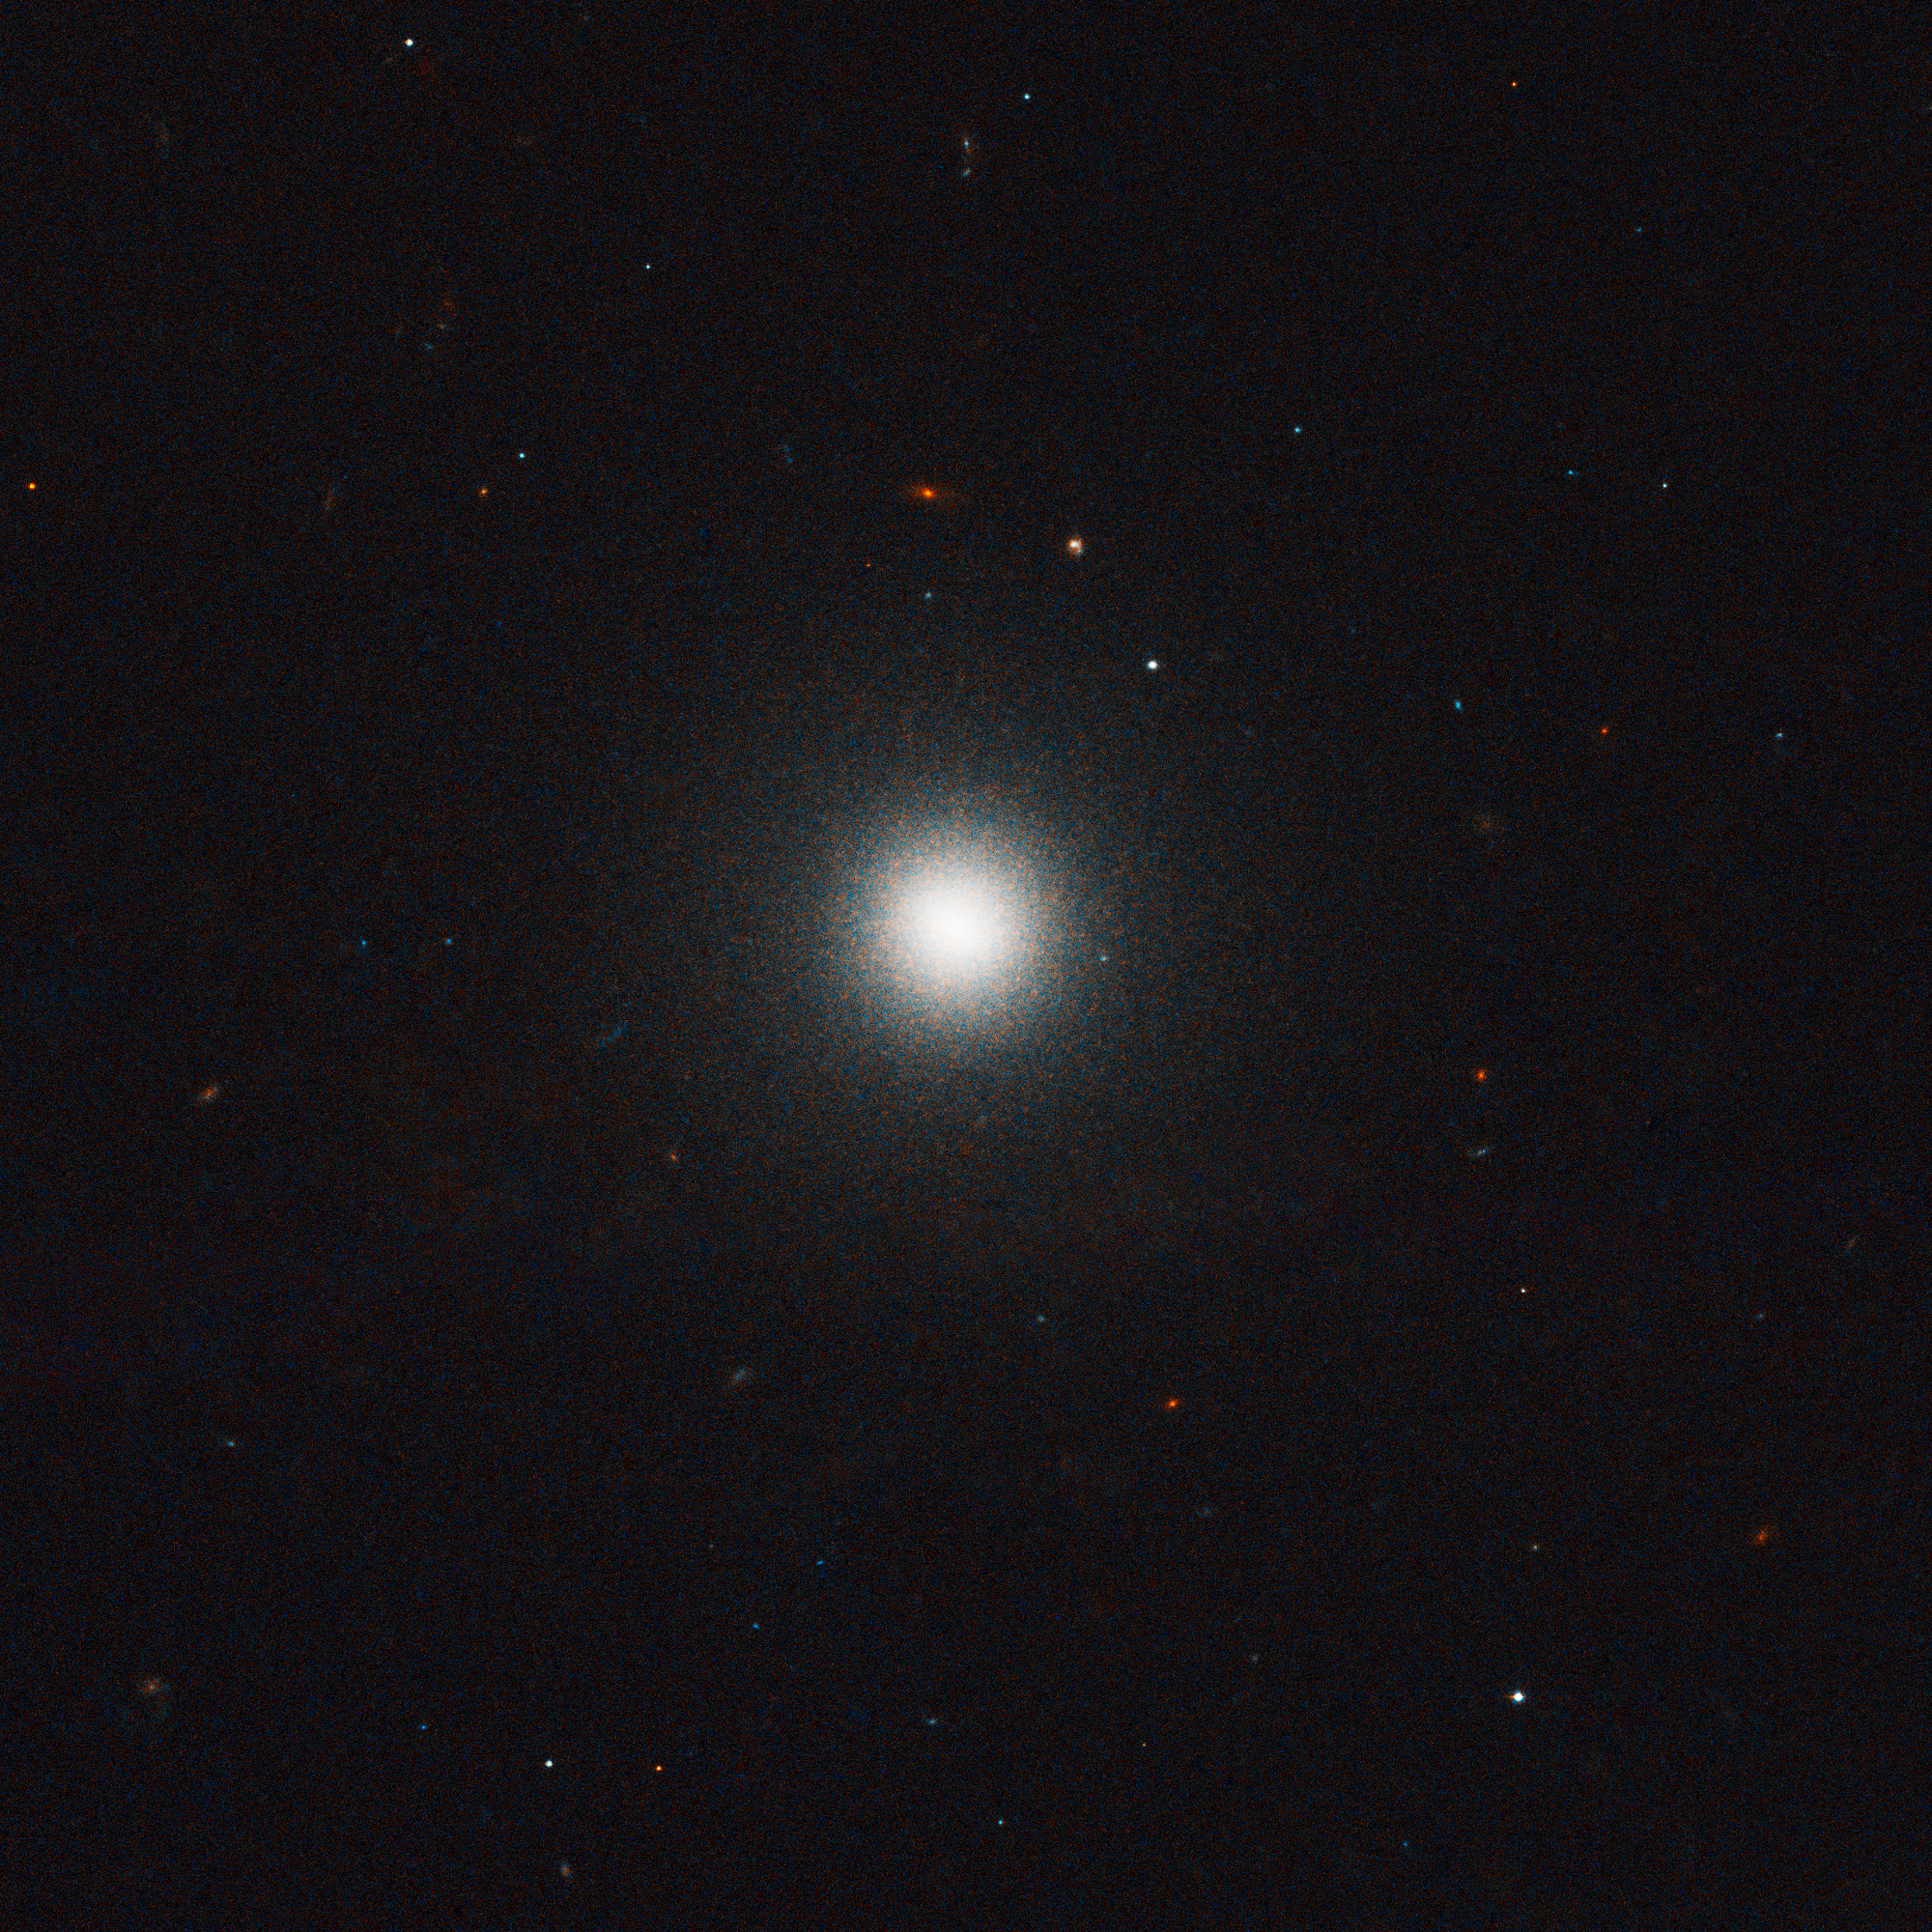

VCC 1993 in the Virgo cluster of galaxies

Virgo cluster galaxy VCC 1993. Hubble's "eye" is so sharp that it was able to pick out the fuzzy globular clusters, which, at that distance, look like individual stars bunched up around the galaxies, instead of groupings of stars.

Credit: ESA, NASA and E. Peng (Peking University, Beijing)